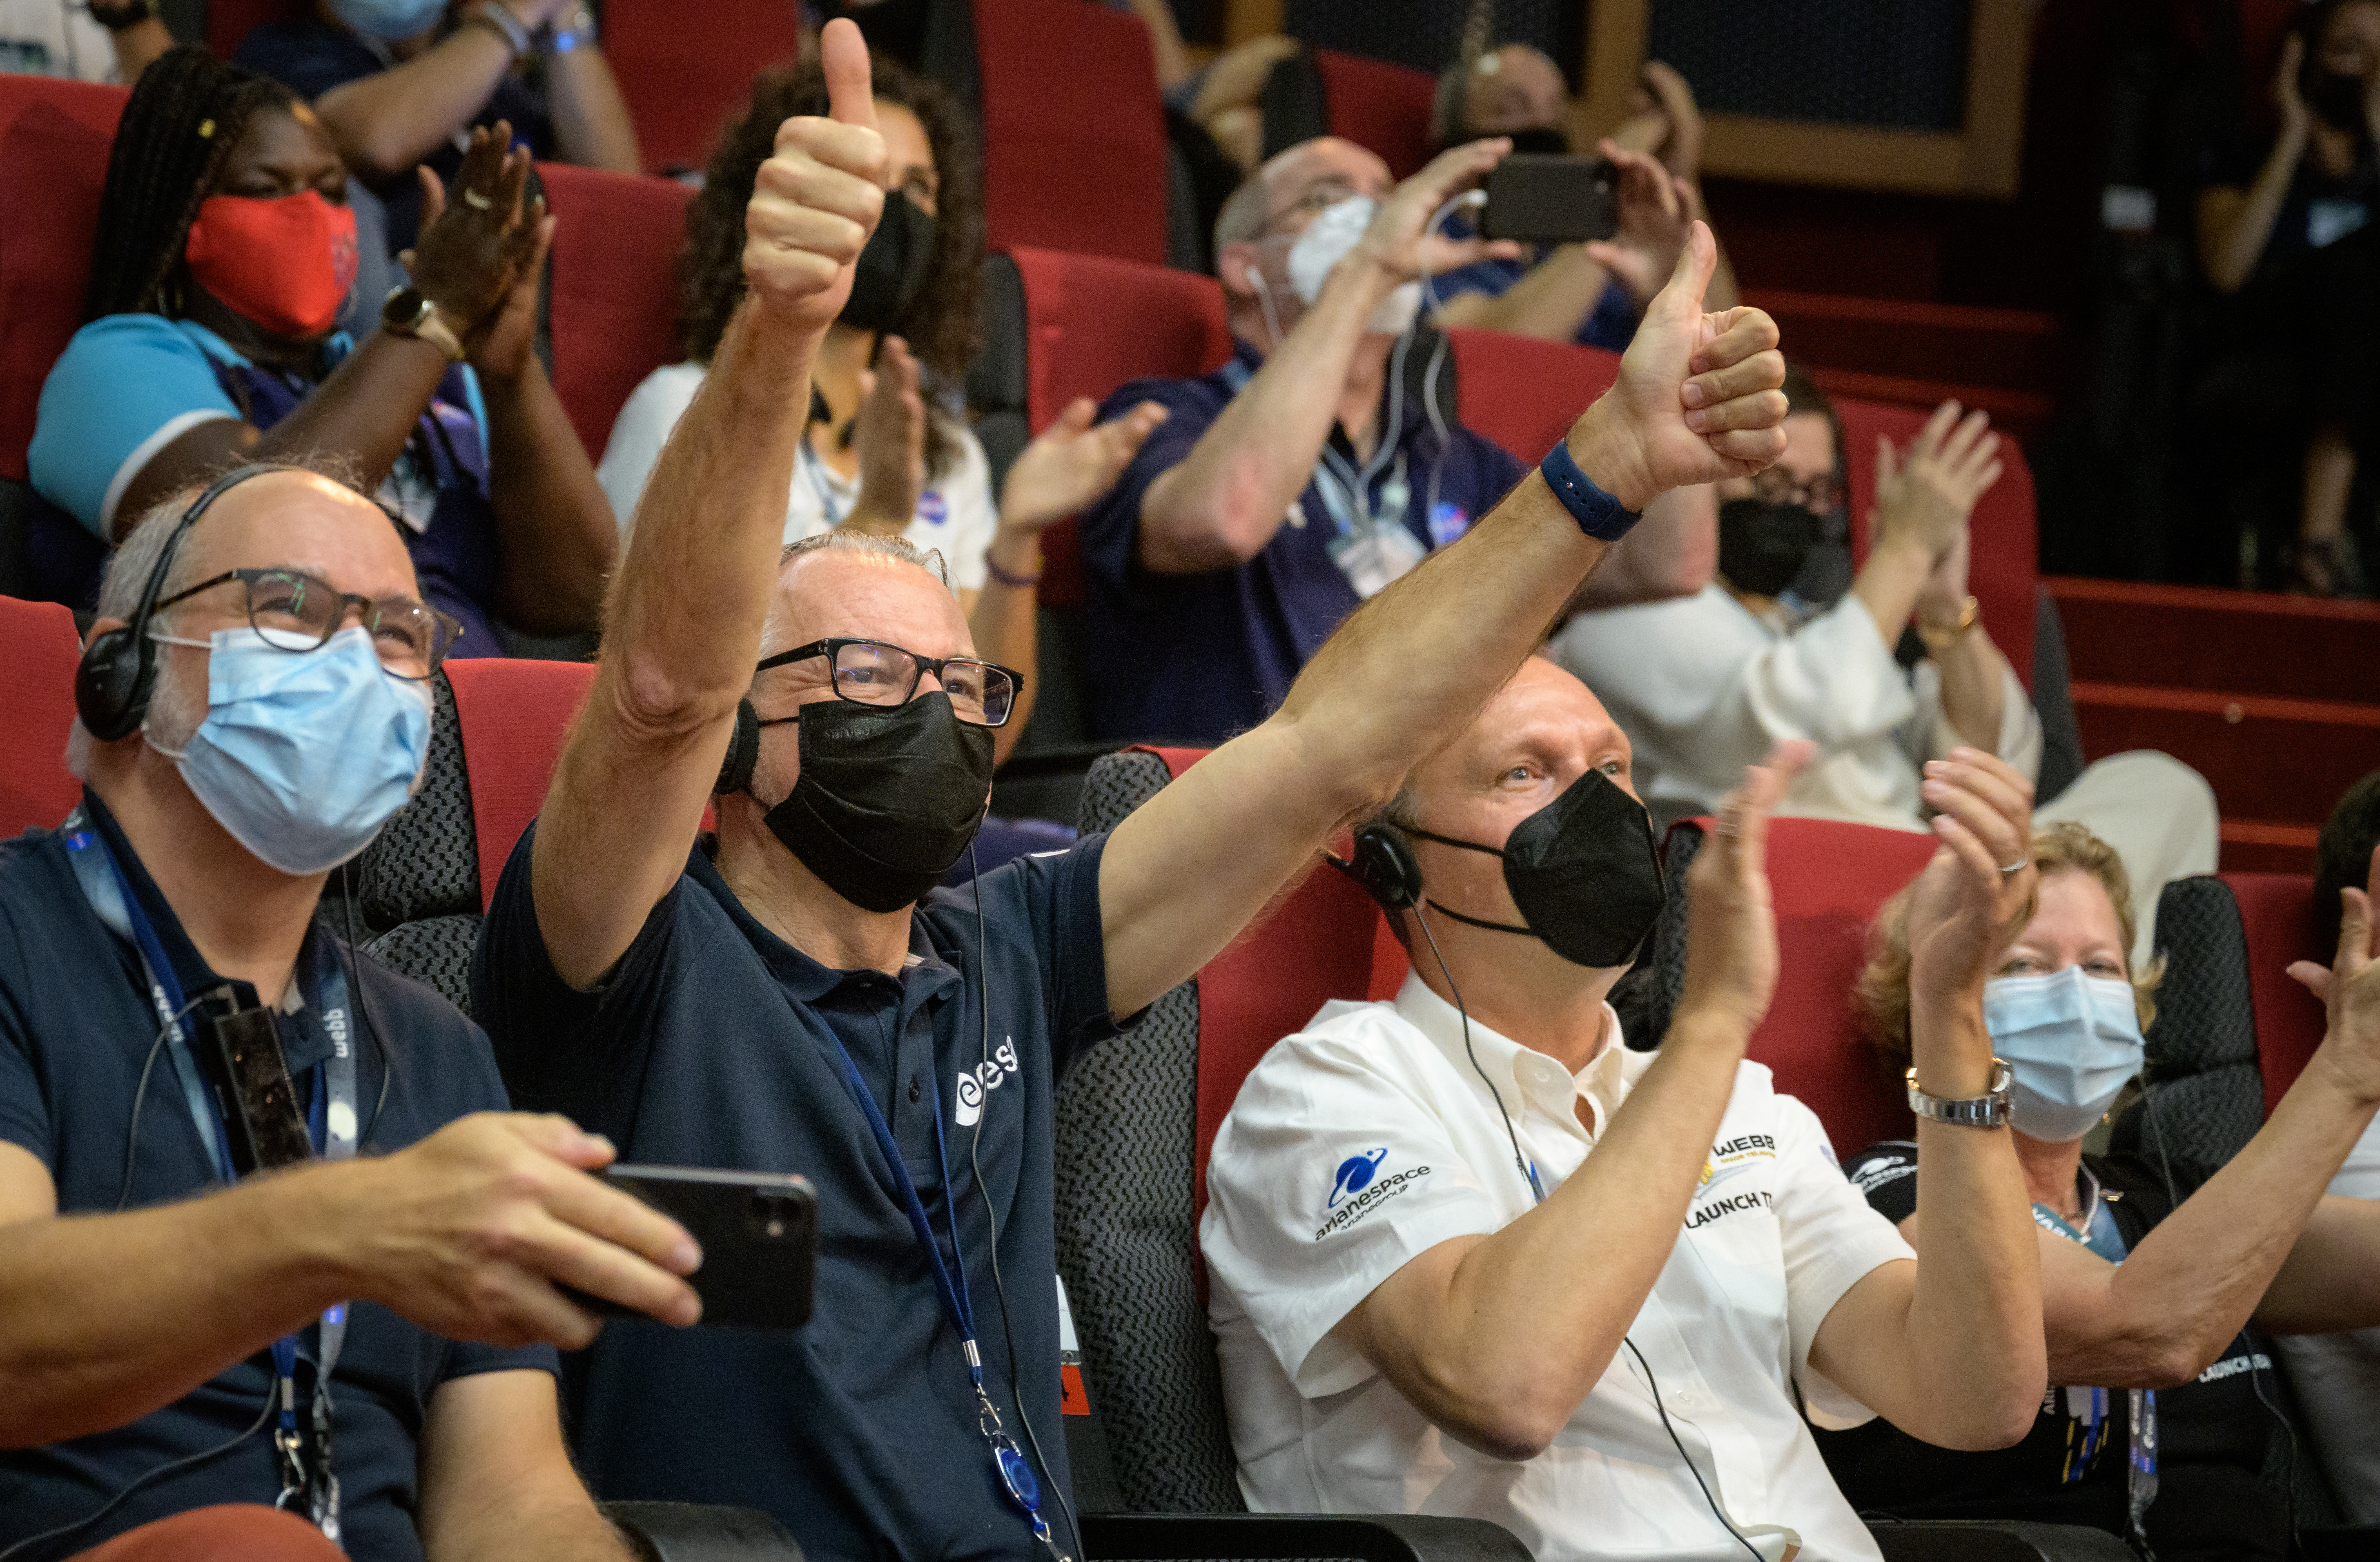

Webb launch celebration

ESA (European Space Agency) Director-General Dr. Josef Aschbacher, 2nd from left, and NASA Associate Administrator for the Science Mission Directorate Thomas Zurbuchen, 3rd from left, celebrate after hearing confirmation that the James Webb Space Telescope successfully separated from the Ariane 5 rocket, Saturday, Dec. 25, 2021, in the Jupiter Hall of the Guiana Space Centre in Kourou, French Guiana. The James Webb Space Telescope (sometimes called JWST or Webb) is a large infrared telescope with a 21.3 foot (6.5 meter) primary mirror. The observatory will study every phase of cosmic history—from within our solar system to the most distant observable galaxies in the early universe.

Credit: NASA/Bill Ingalls